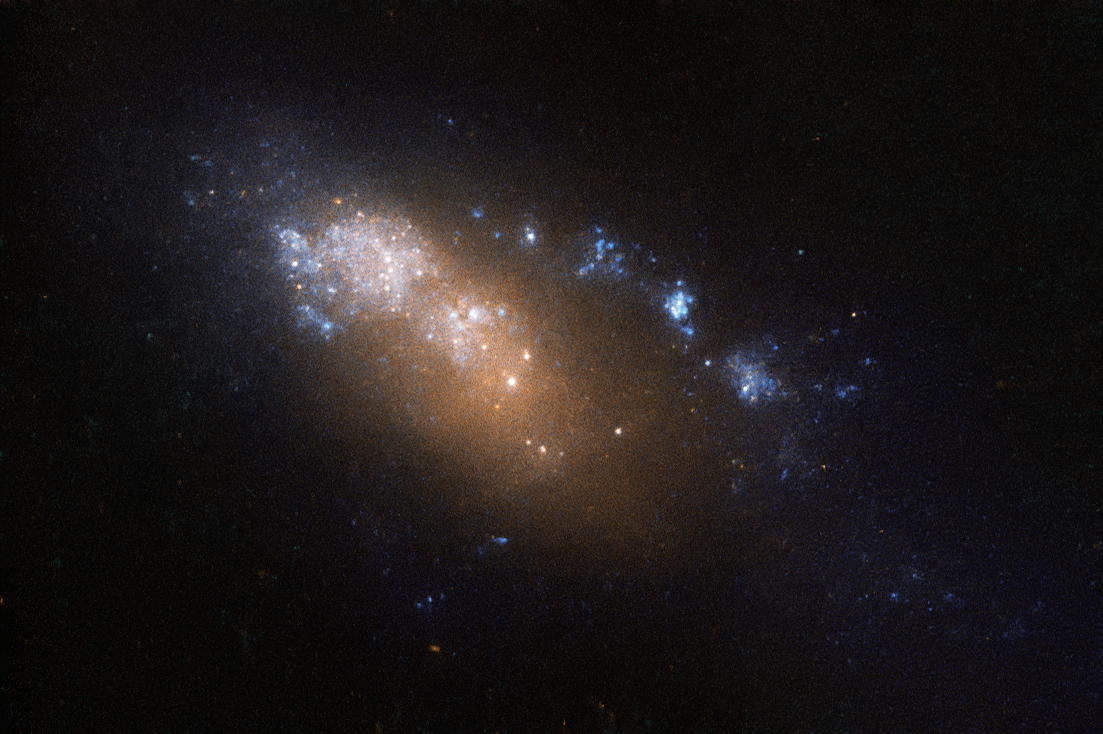

A double discovery

NGC 178 may be small, but it packs quite a punch. Measuring around 40 000 light-years across, its diameter is less than half that of the Milky Way, and it is accordingly classified as a dwarf galaxy. Despite its diminutive size, NGC 178 is busy forming new stars. On average, the galaxy forms stars totalling around half the mass of the Sun per year — enough to label it a starburst galaxy.

The galaxy’s discovery is an interesting, and somewhat confusing, story. It was originally discovered by American astronomer Ormond Stone in 1885 and dubbed NGC 178, but its position in the sky was recorded incorrectly — by accident the value for the galaxy’s right ascension (which can be thought of as the celestial equivalent of terrestrial longitude) was off by a considerable amount.

In the years that followed NGC 178 was spotted again, this time by French astronomer Stéphane Javelle. As no catalogued object occupied that position in the sky, Javelle believed he had discovered a new galaxy and entered it into the expanded Index Catalogue under the name IC 39. Later, American astronomer Herbert Howe also observed the object and corrected Stone’s initial mistake. Many years later, astronomers finally noticed that NGC 178 and IC 39 were actually the same object!

This image of NGC 178 comprises data gathered by the Wide Field Planetary Camera 2 aboard the NASA/ESA Hubble Space Telescope.

Credit: ESA/Hubble & NASA